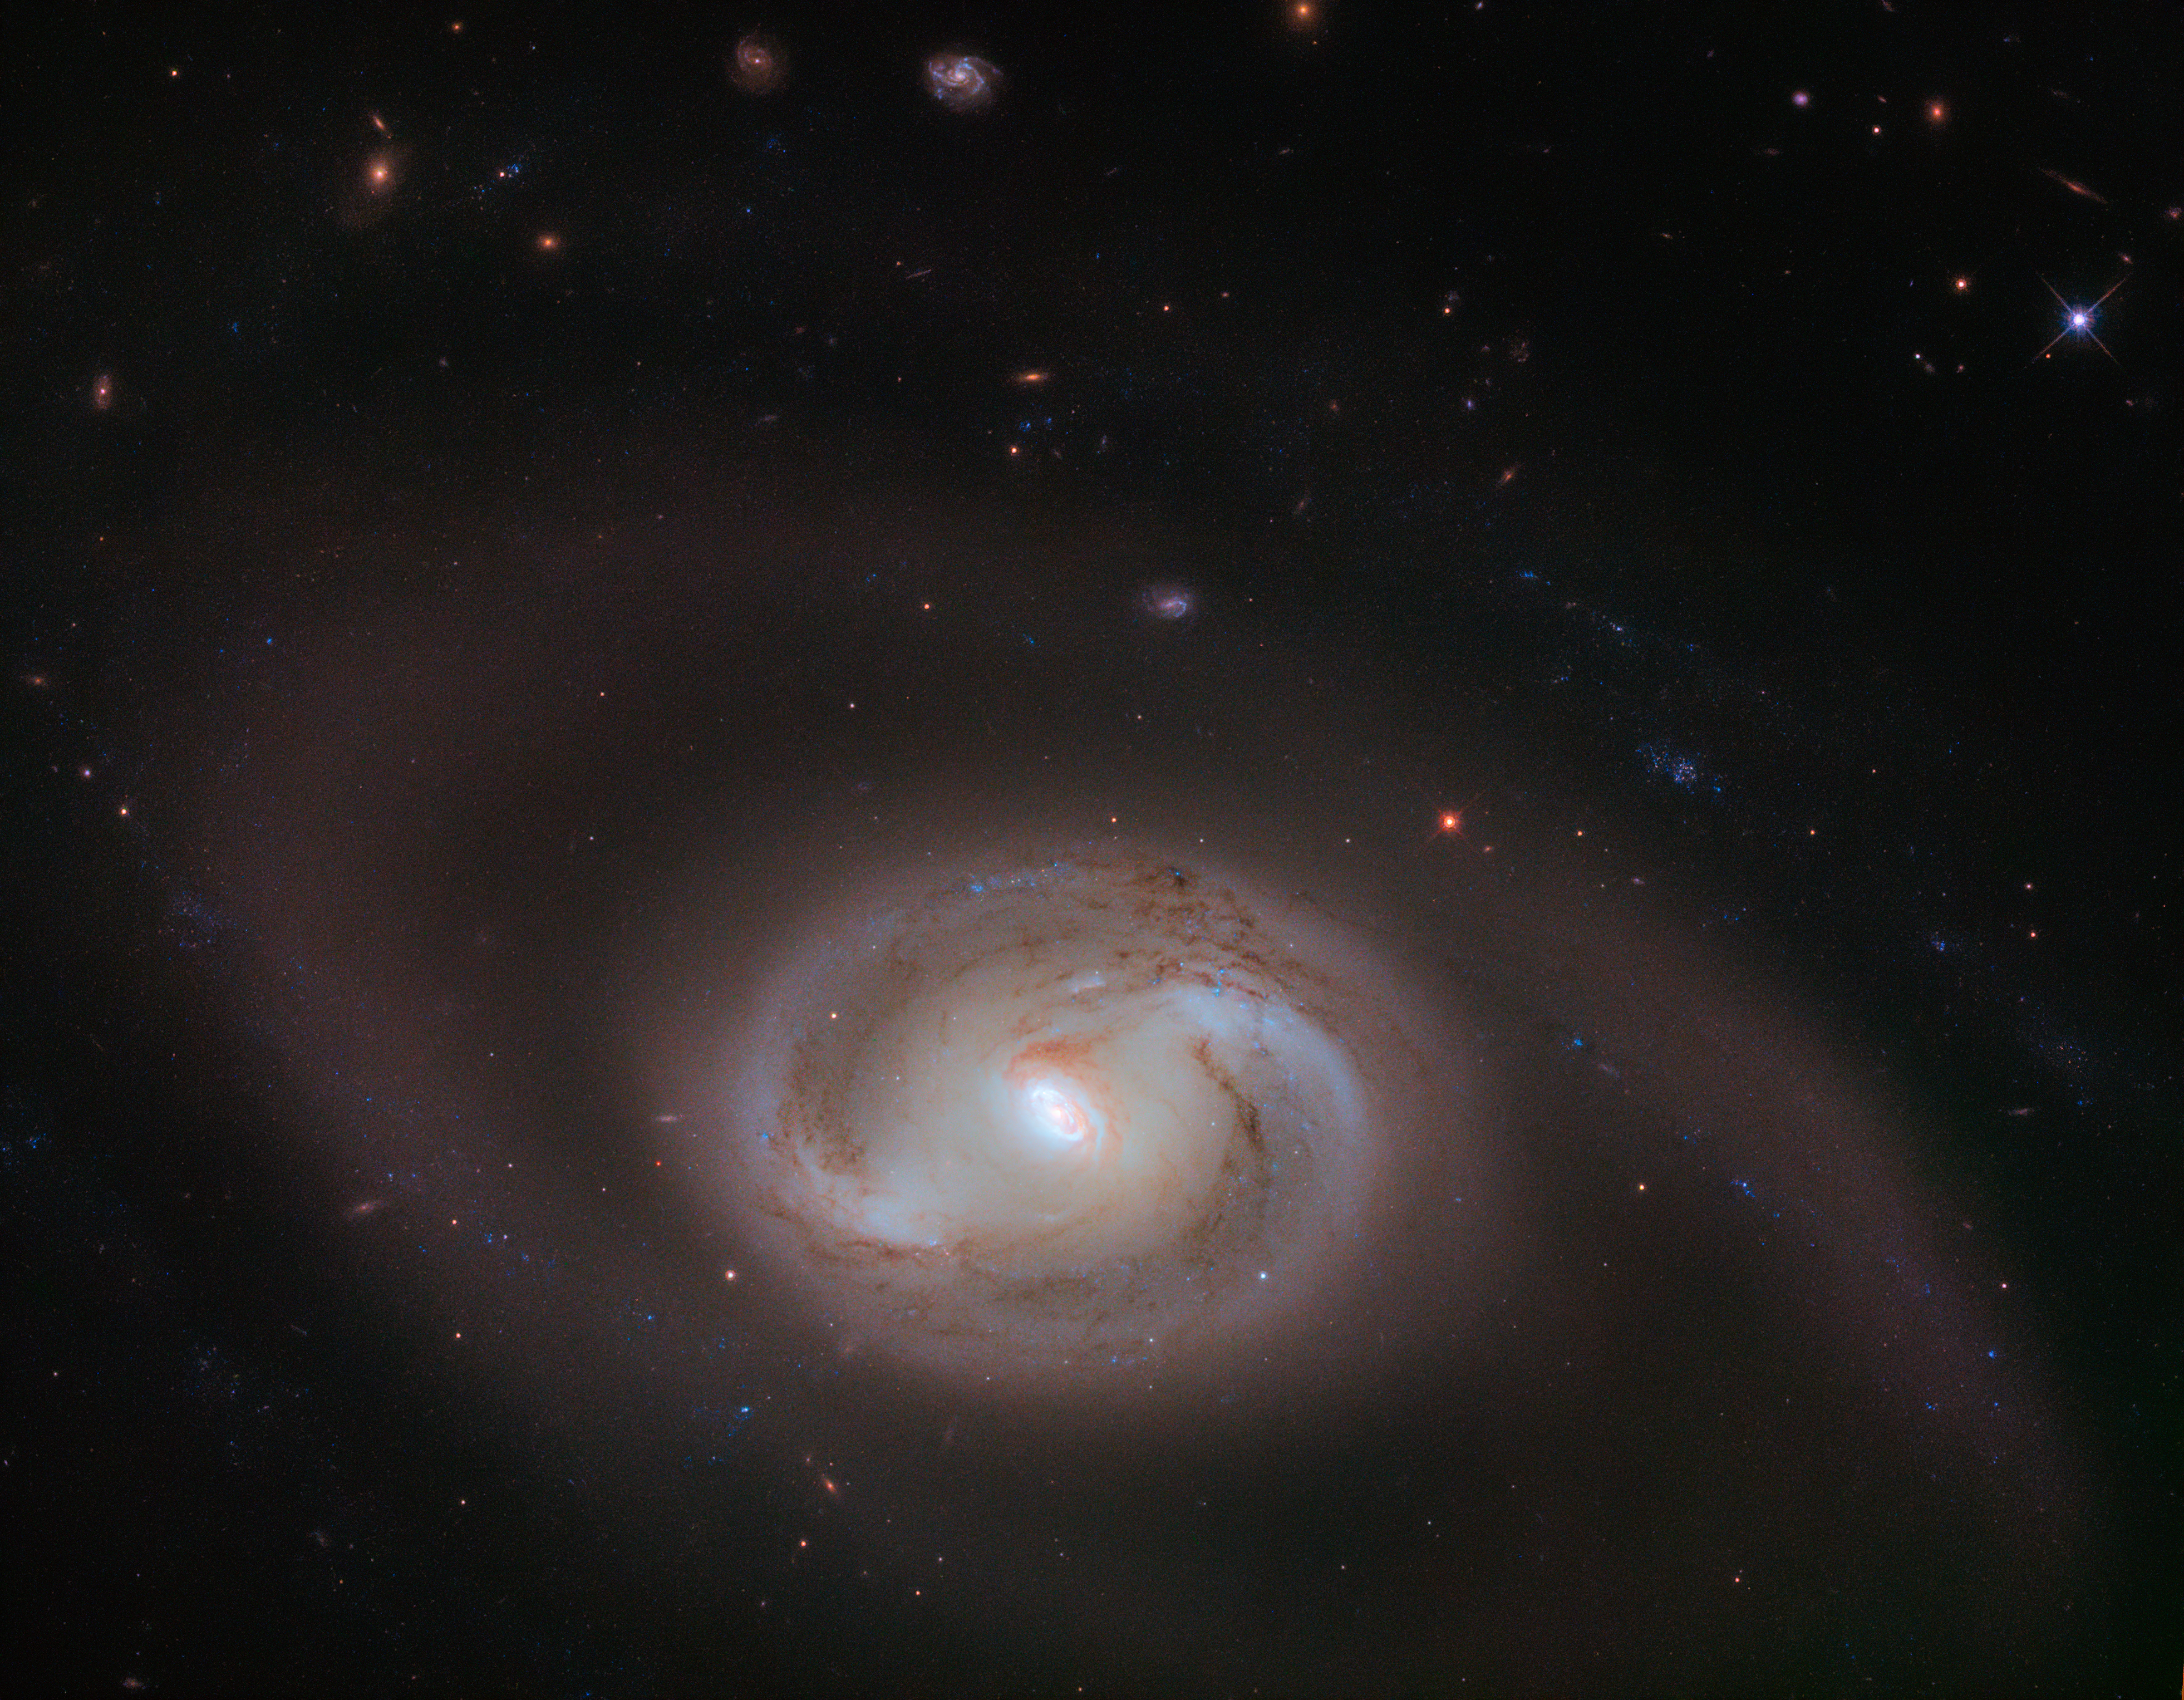

Rings Upon Rings

At first glance, the subject of this NASA/ESA Hubble Space Telescope image looks to be a simple spiral galaxy, with two pinwheeling arms emerging from a central bar of stars and material that cuts through the galactic centre. In fact, there are rings within these spiral arms, too: spirals within a spiral.

This kind of morphology is known as a multiring structure. As this description suggests, this galaxy, named NGC 2273, hosts an inner ring and two outer “pseudorings” — having so many distinct rings is rare, and makes NGC 2273 unusual. Rings are created when a galaxy’s spiral arms appear to loop around to nearly close upon one another, combined with a trick of cosmic perspective. NGC 2273’s two pseudorings are formed by two swirling sets of spiral arms coming together, and the inner ring by two arcing structures nearer to the galactic centre, which seem to connect in a similar way.

These rings are not the only unique feature of this galaxy. NGC 2273 is also a Seyfert galaxy, a galaxy with an extremely luminous core. In fact, the centre of a galaxy such as this is powered by a supermassive black hole, and can glow brightly enough to outshine an entire galaxy like the Milky Way.

Credit: ESA/Hubble & NASA, J. Greene